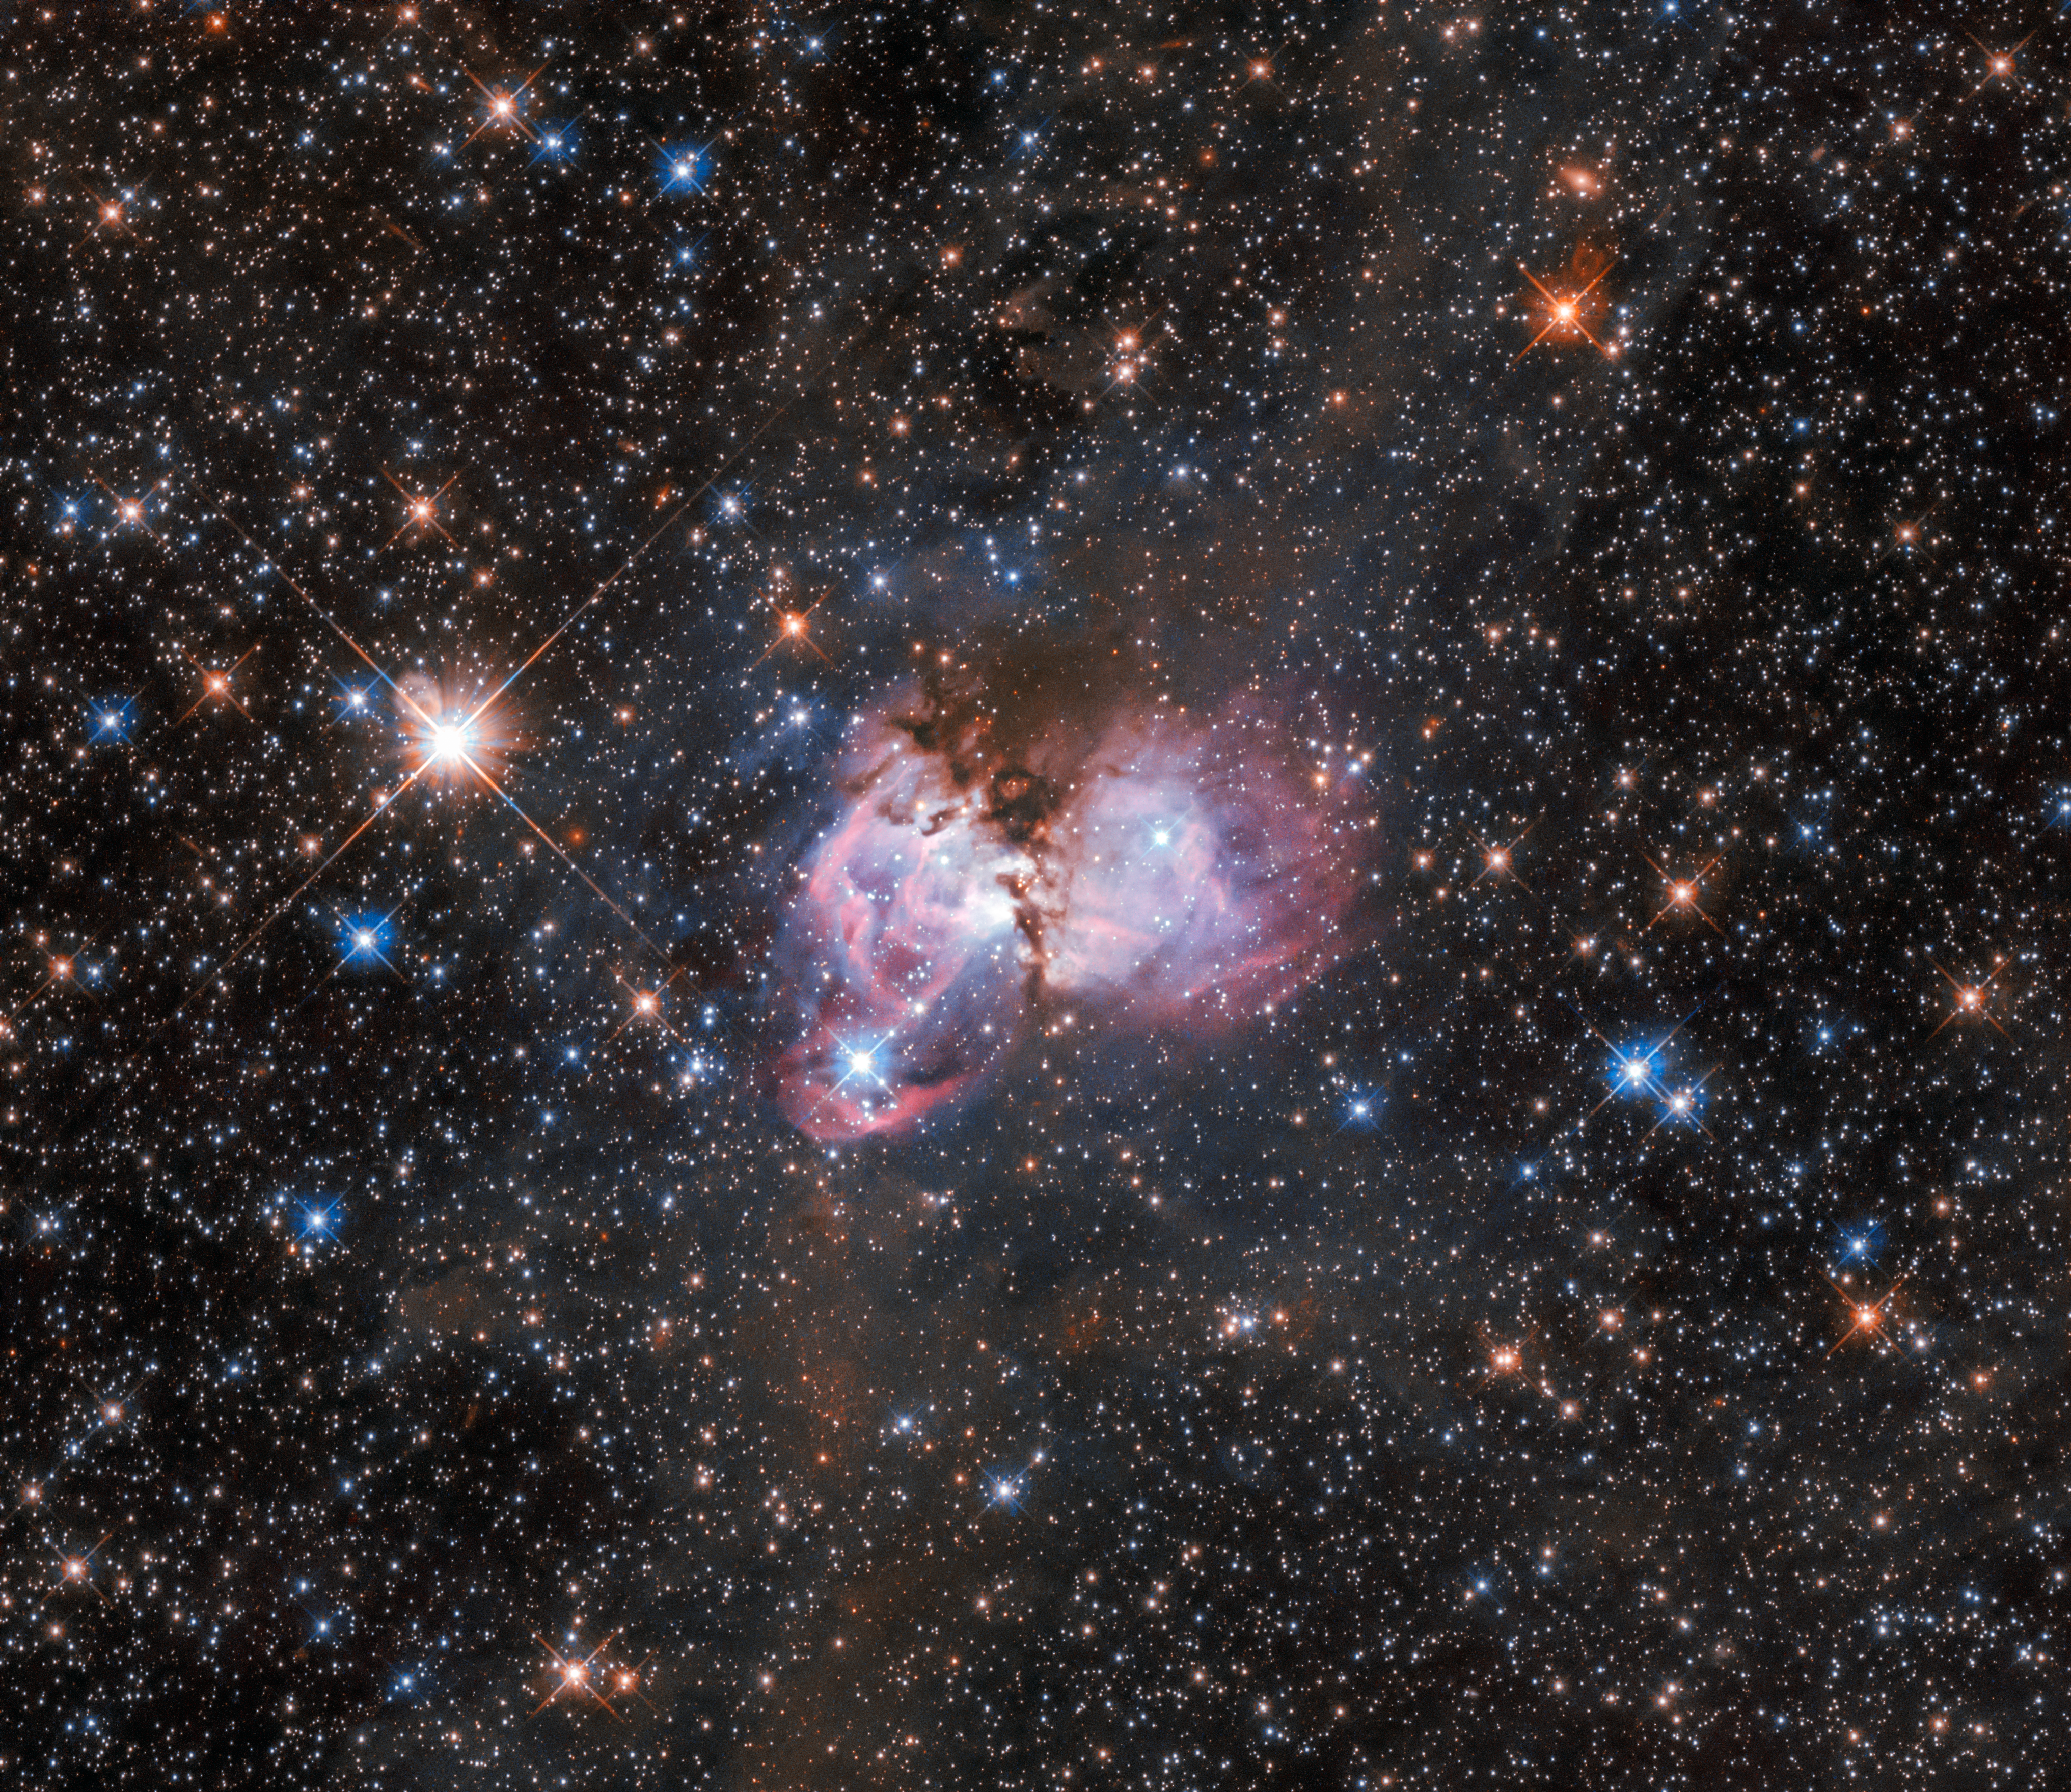

A massive laboratory

This image shows a region of space called LHA 120-N150. It is a substructure of the gigantic Tarantula Nebula. The latter is the largest known stellar nursery in the local Universe. The nebula is situated more than 160 000 light-years away in the Large Magellanic Cloud, a neighbouring dwarf irregular galaxy that orbits the Milky Way.

Credit: ESA/Hubble, NASA, I. Stephens